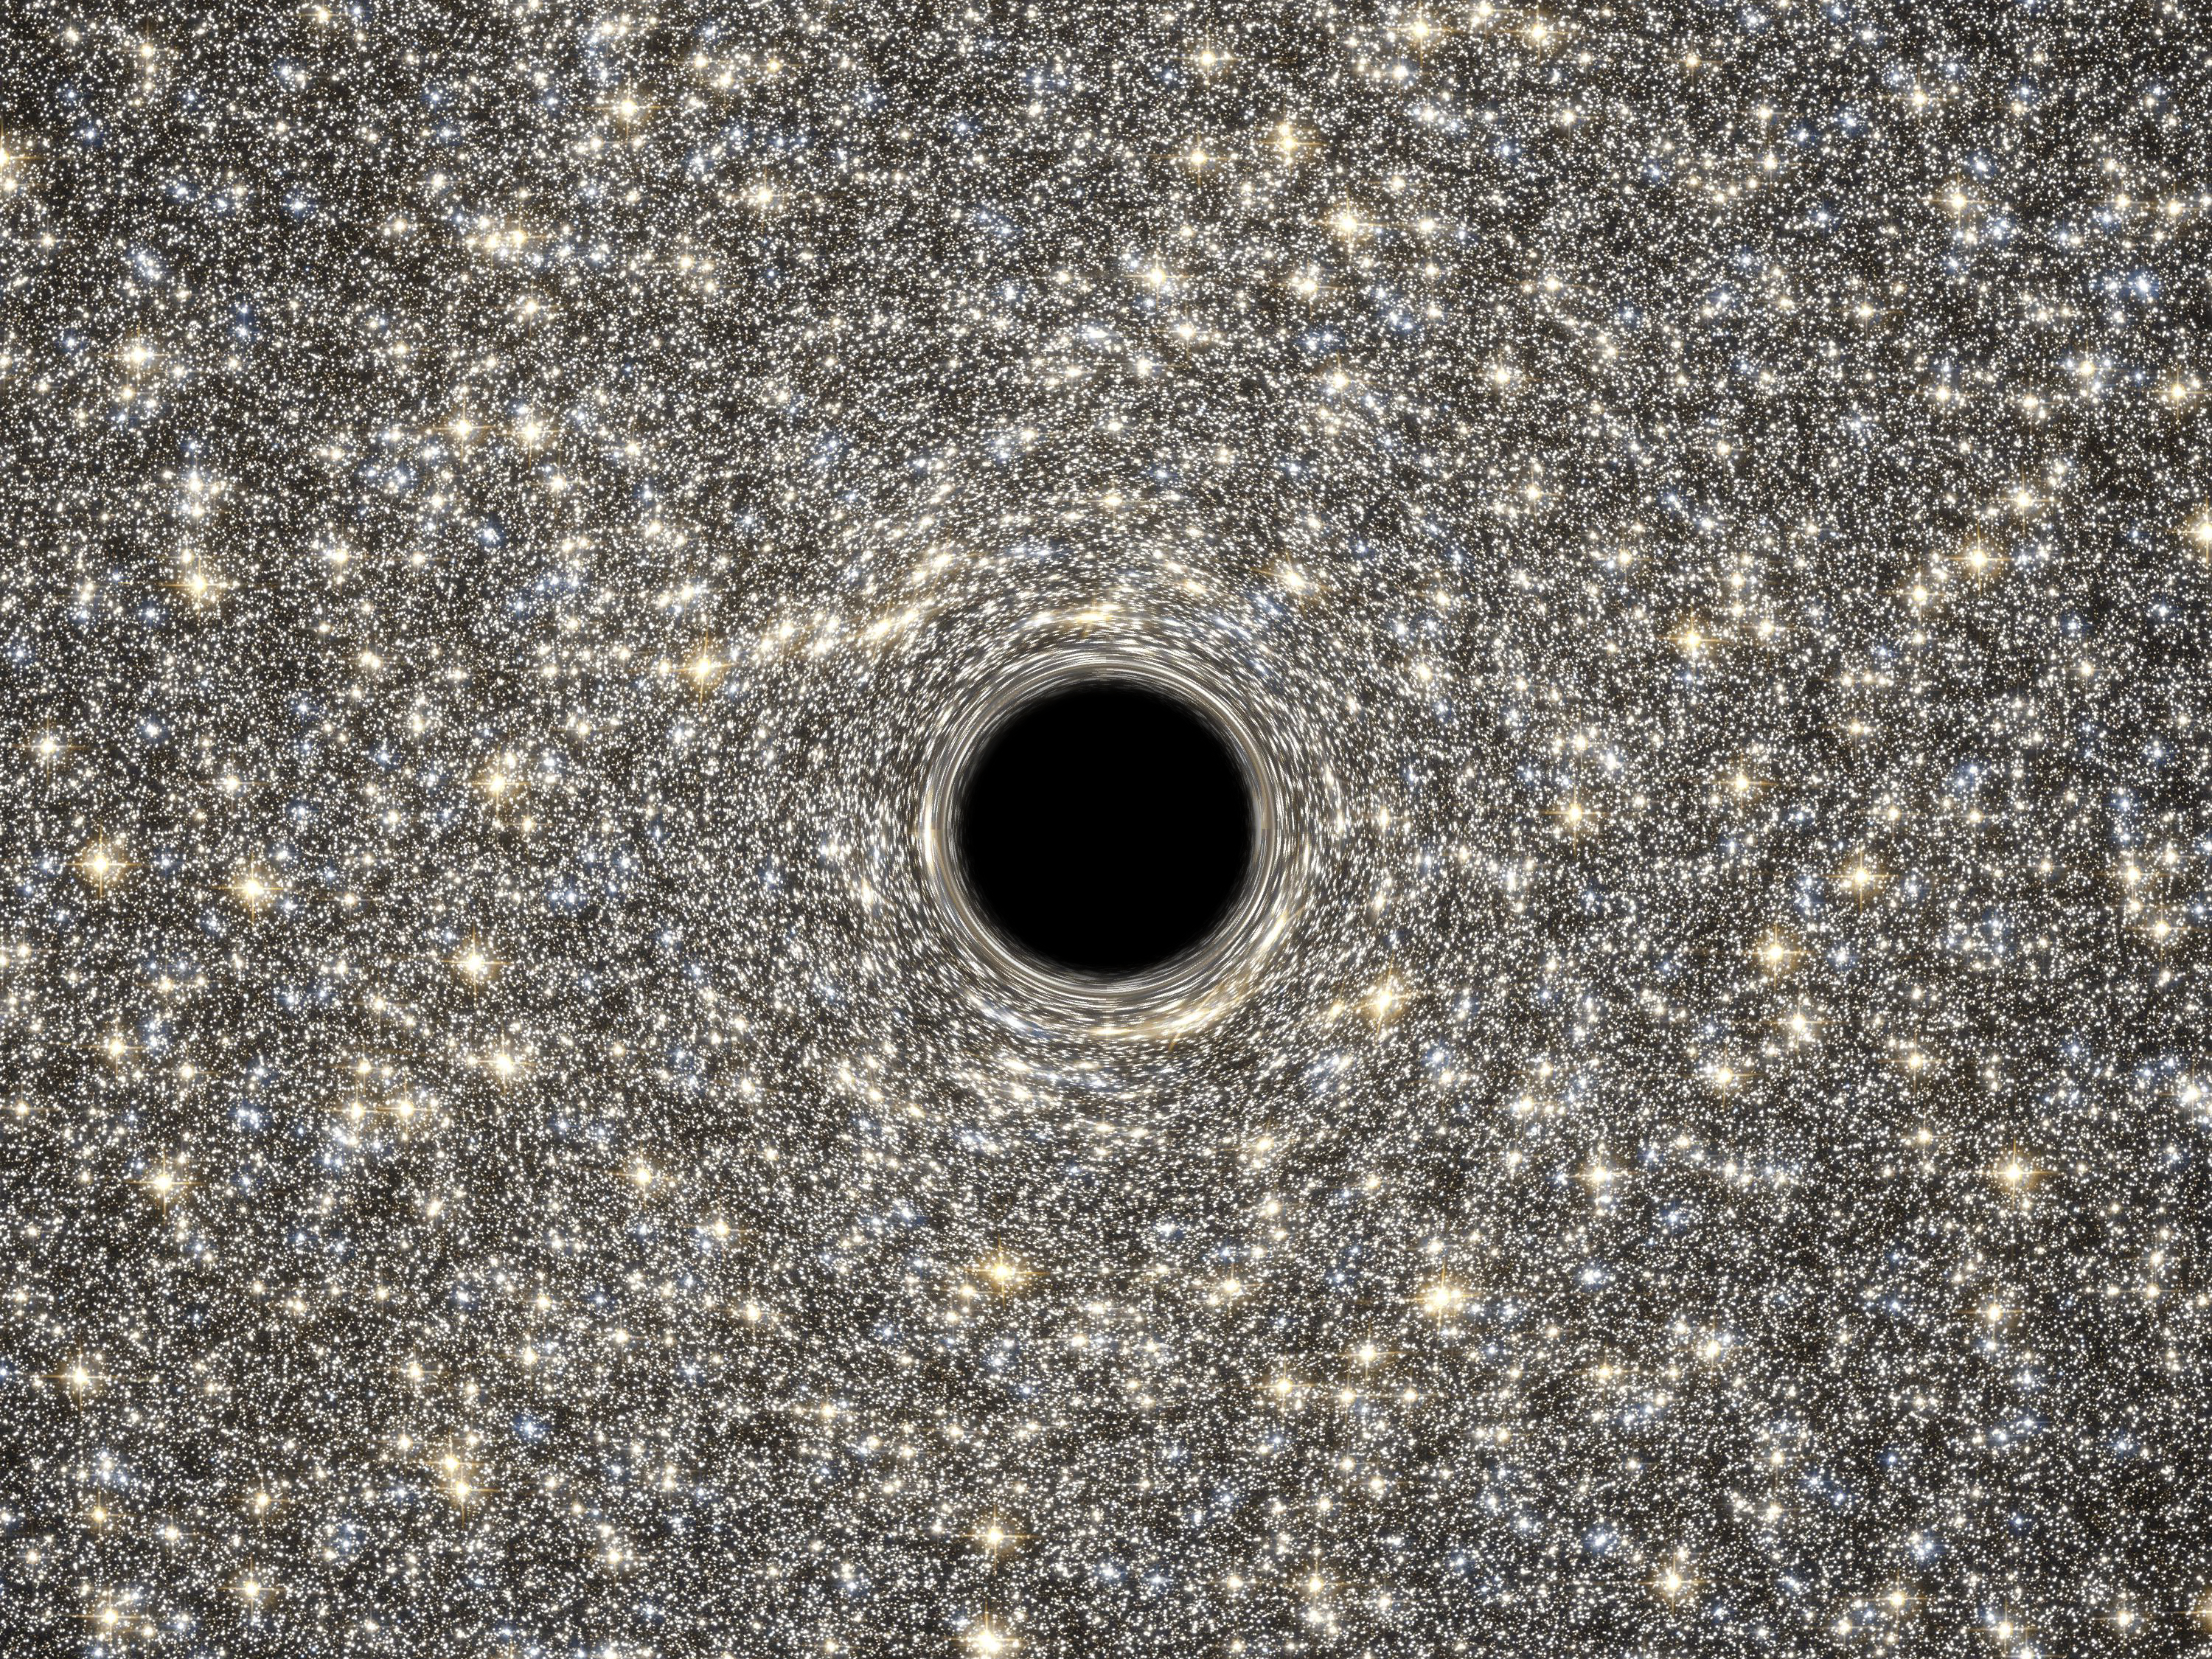

Artist’s concept of supermassive black hole within M60-UCD1

This is an illustration of the supermassive black hole located in the middle of the very dense galaxy M60-UCD1. It weighs as much as 21 million times the mass of our Sun.

Lying about 50 million light-years away, M60-UCD1 is a tiny galaxy with a diameter of 300 light-years — just 1/500th of the diameter of the Milky Way! Despite its size it is pretty crowded, containing some 140 million stars.

Because no light can escape from the black hole, it appears simply in silhouette against the starry background. The black hole’s intense gravitational field warps the light of the background stars to form ring-like images just outside the dark edges of the black hole’s event horizon. Combined observations by the NASA/ESA Hubble Space Telescope and NASA’s Gemini North telescope determined the presence of the black hole inside M60-UCD1.

Credit: NASA, ESA, D. Coe, G. Bacon (STScI)